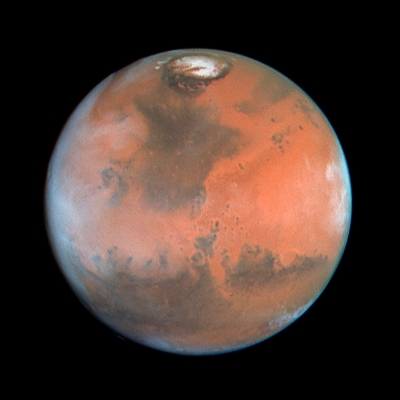

Four Views of Mars in Northern Summer

This view is centered on Ares Valles, where Pathfinder will land on July 4, 1997; the Valles Marineris canyon system stretches to the west across the lower left portion of the planet, while the bright, orangish desert of Arabia Planitia is to the east.

Credit: Phil James (Univ. Toledo), Todd Clancy (Space Science Inst., Boulder, CO), Steve Lee (Univ. Colorado), and NASA/ESA